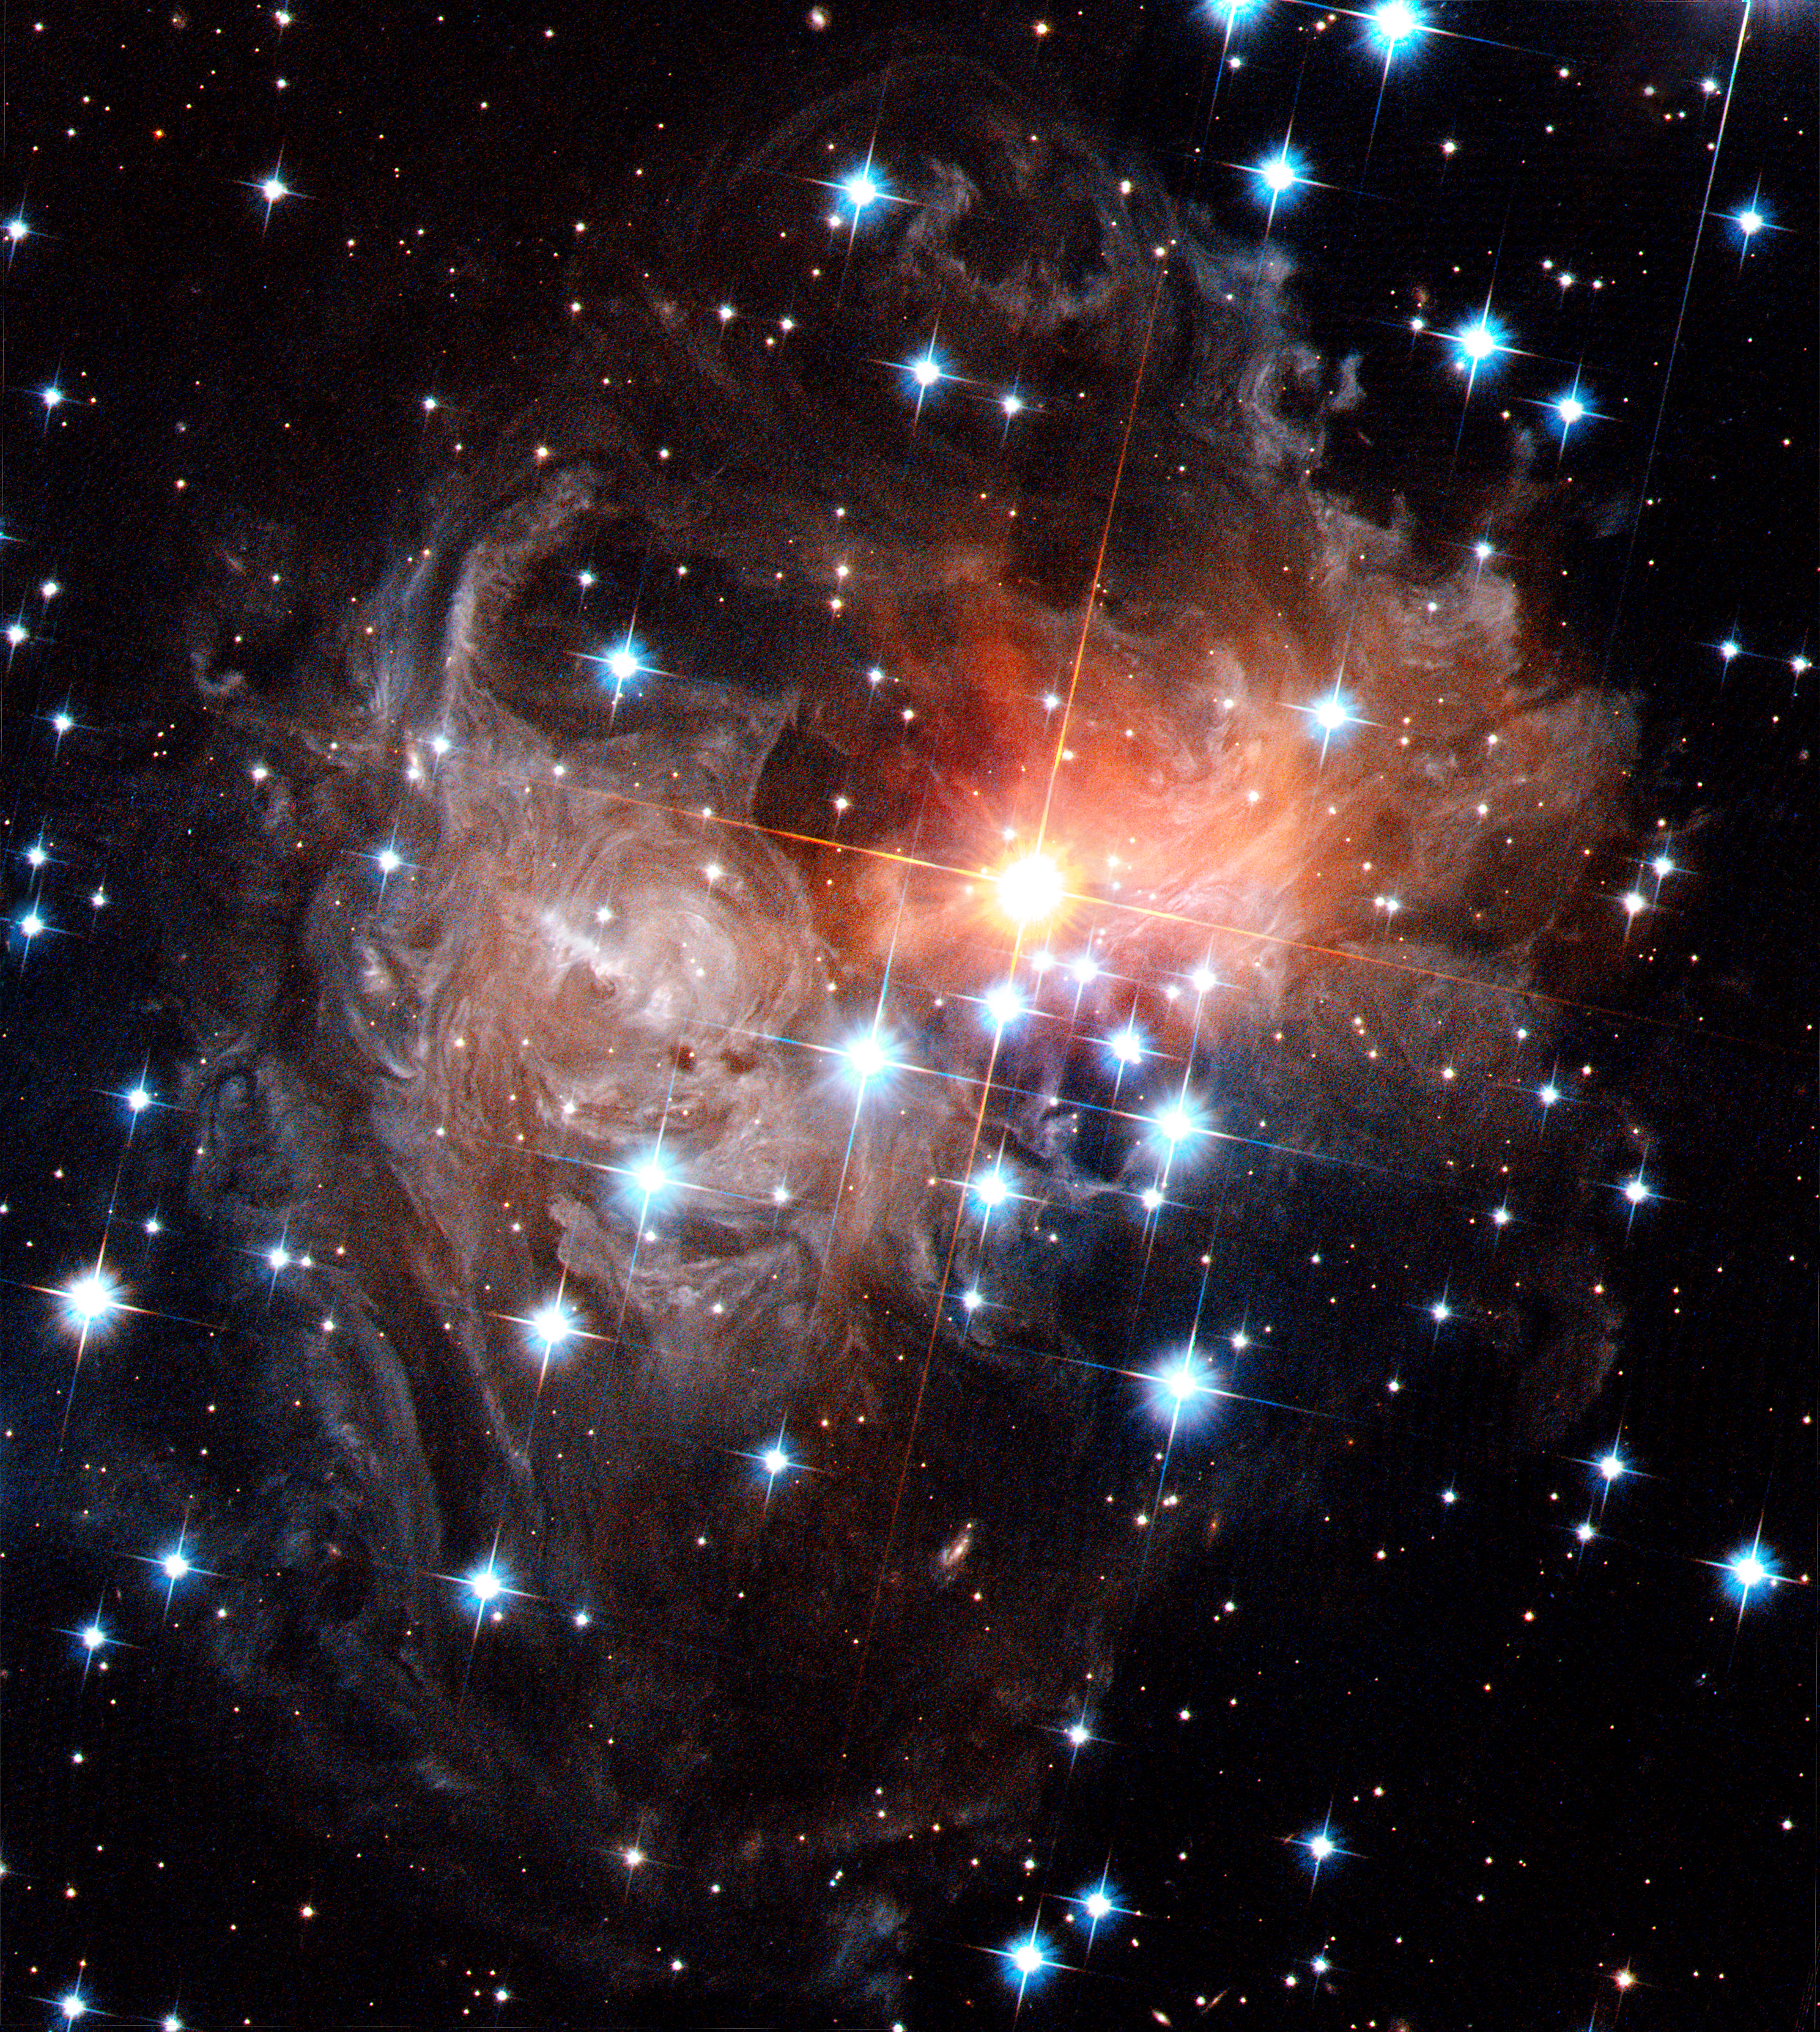

Spectacular view of V838 Monocerotis light echo

The light echo around the star V838 Monocerotis as seen by the Hubble Space Telescope in September 2006.

Credit: NASA, ESA and H. Bond (STScI)